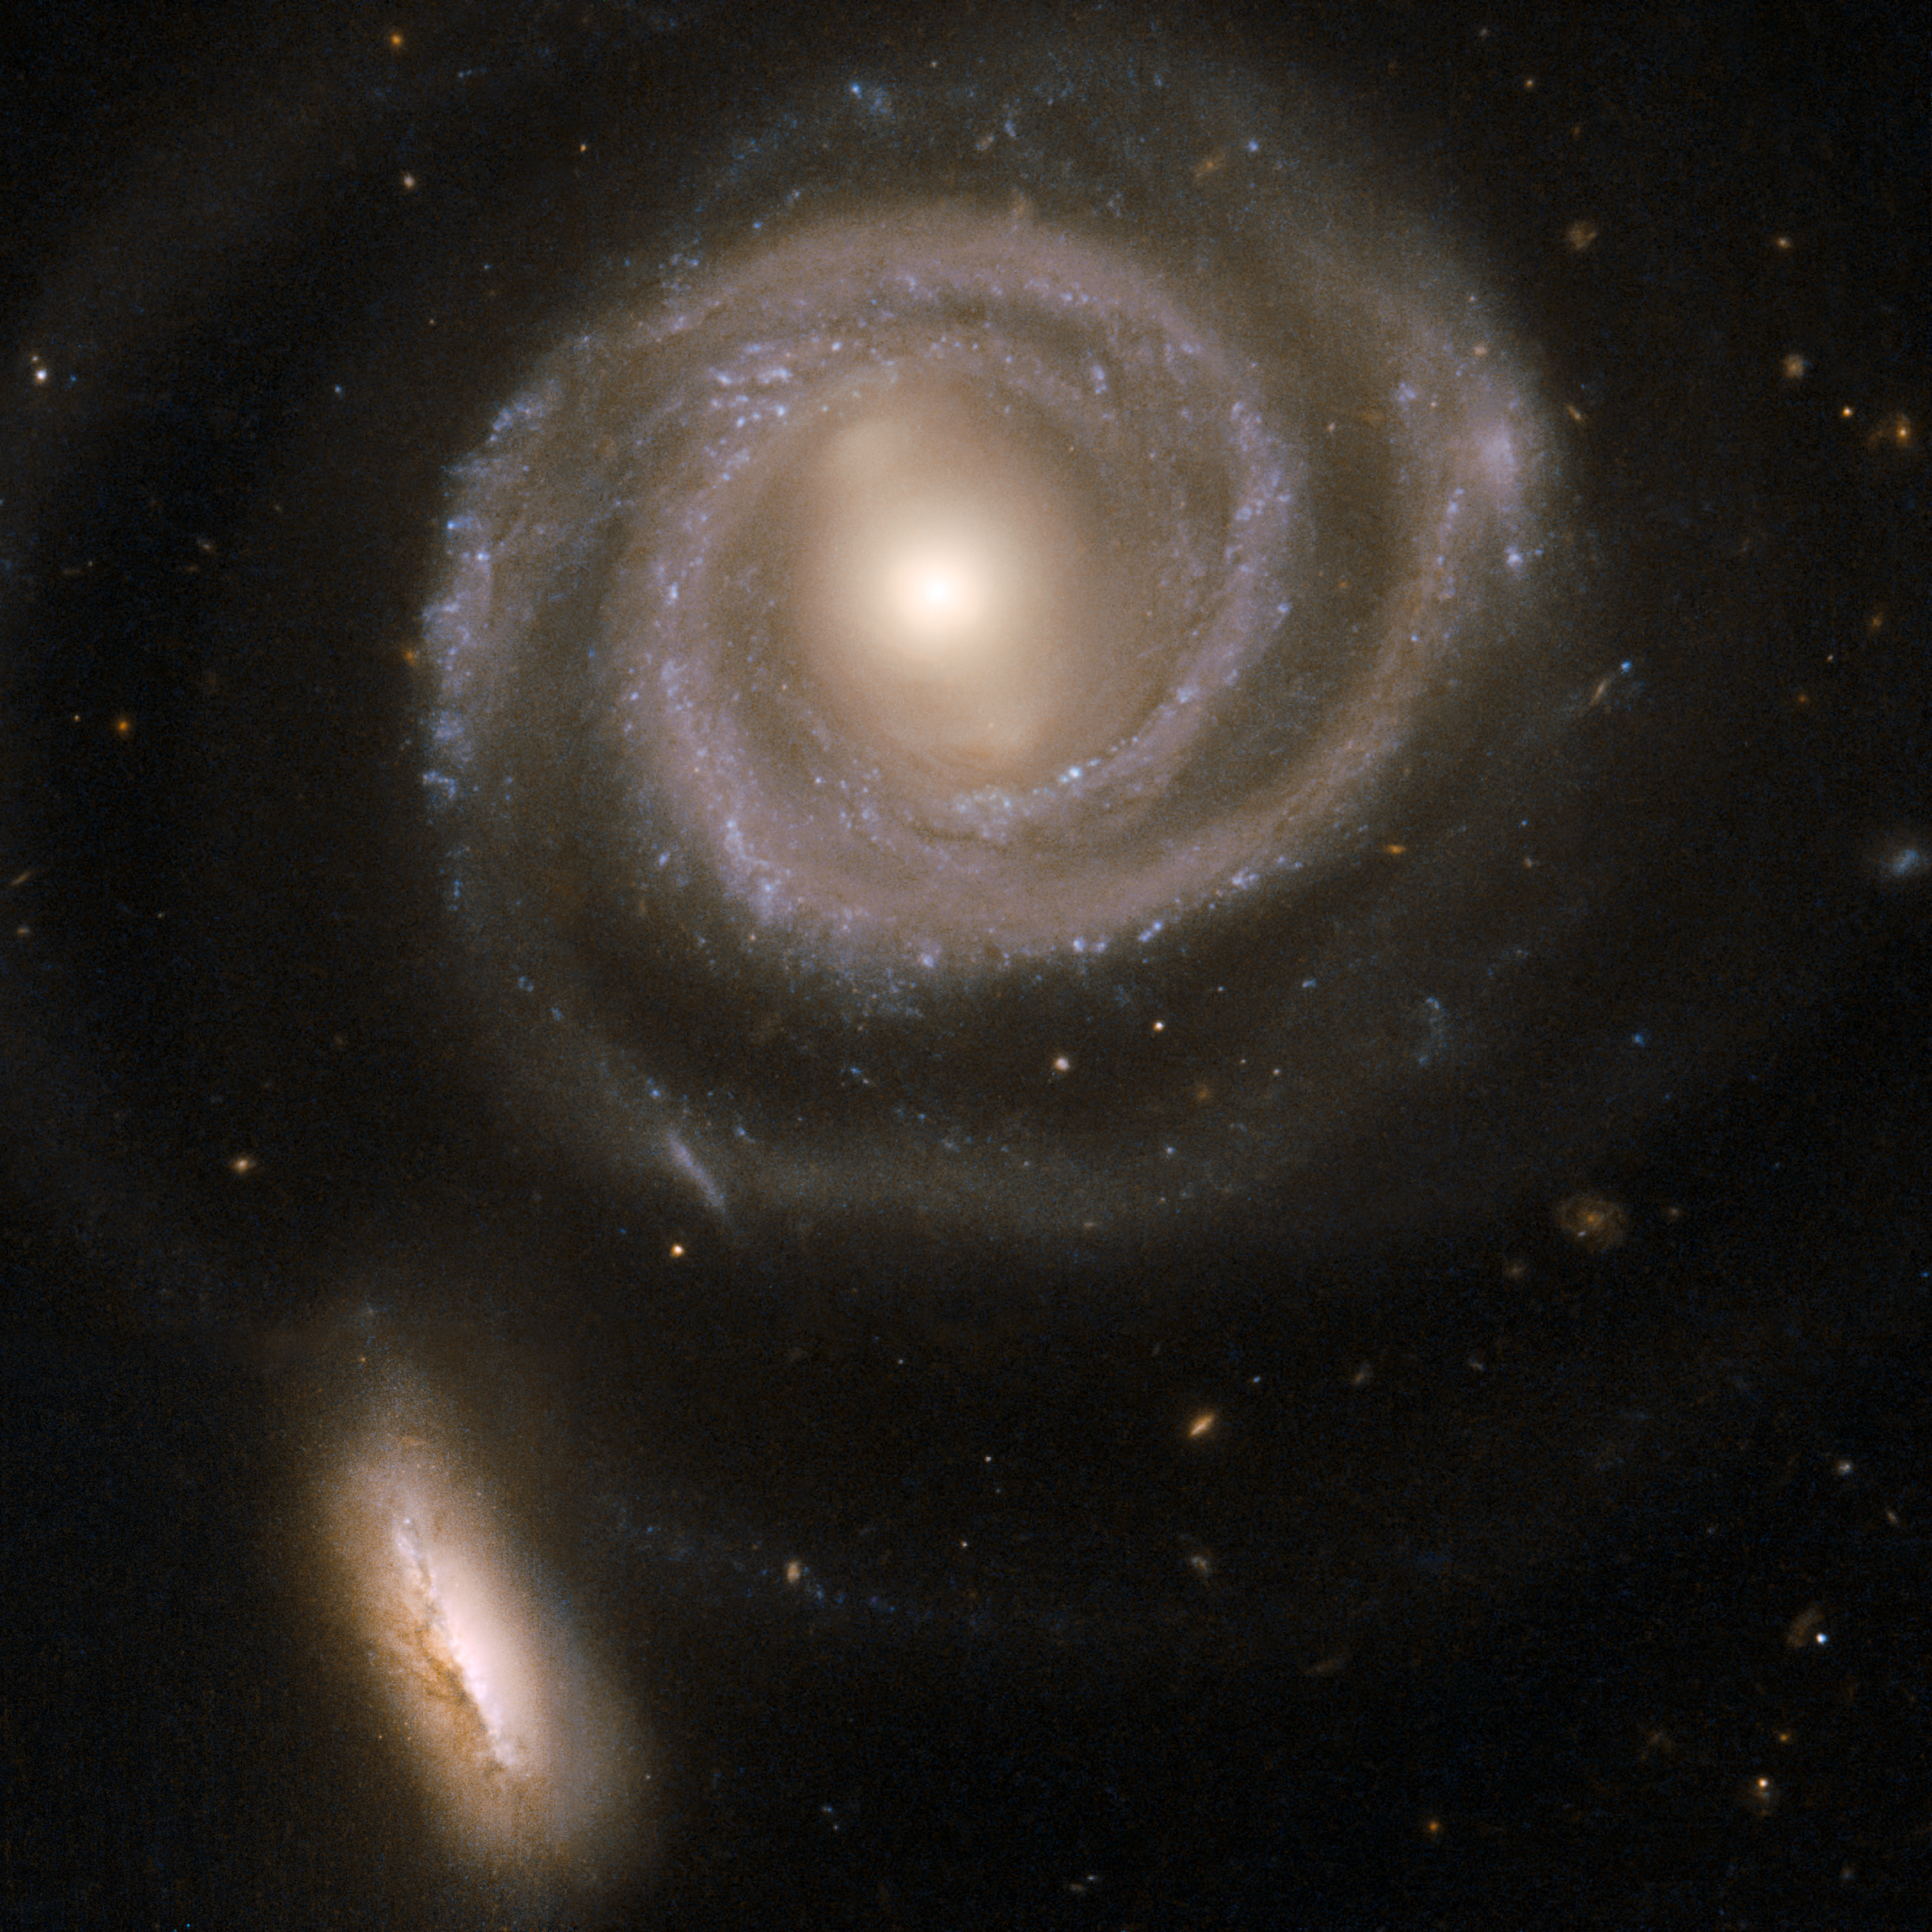

NGC 5754

This beautiful pair of interacting galaxies consists of NGC 5754, the large spiral on the top and NGC 5752, the smaller companion in the bottom left corner of the image. NGC 5754's internal structure has hardly been disturbed by the interaction. The outer structure does exhibit tidal features, as does the symmetry of the inner spiral pattern and the kinked arms just beyond its inner ring. In contrast, NGC 5752 has undergone a starburst episode, with a rich population of massive and luminous star clusters clumping around the core and intertwined with intricate dust lanes. The contrasting reactions of the two galaxies to their interaction are due to their differing masses and sizes. NGC 5754 is located in the constellation Boötes, the Herdsman, some 200 million light-years away.

This image is part of a large collection of 59 images of merging galaxies taken by the Hubble Space Telescope and released on the occasion of its 18th anniversary on 24th April 2008.

Credit: NASA, ESA, the Hubble Heritage Team (STScI/AURA)-ESA/Hubble Collaboration and W. Keel (University of Alabama, Tuscaloosa)